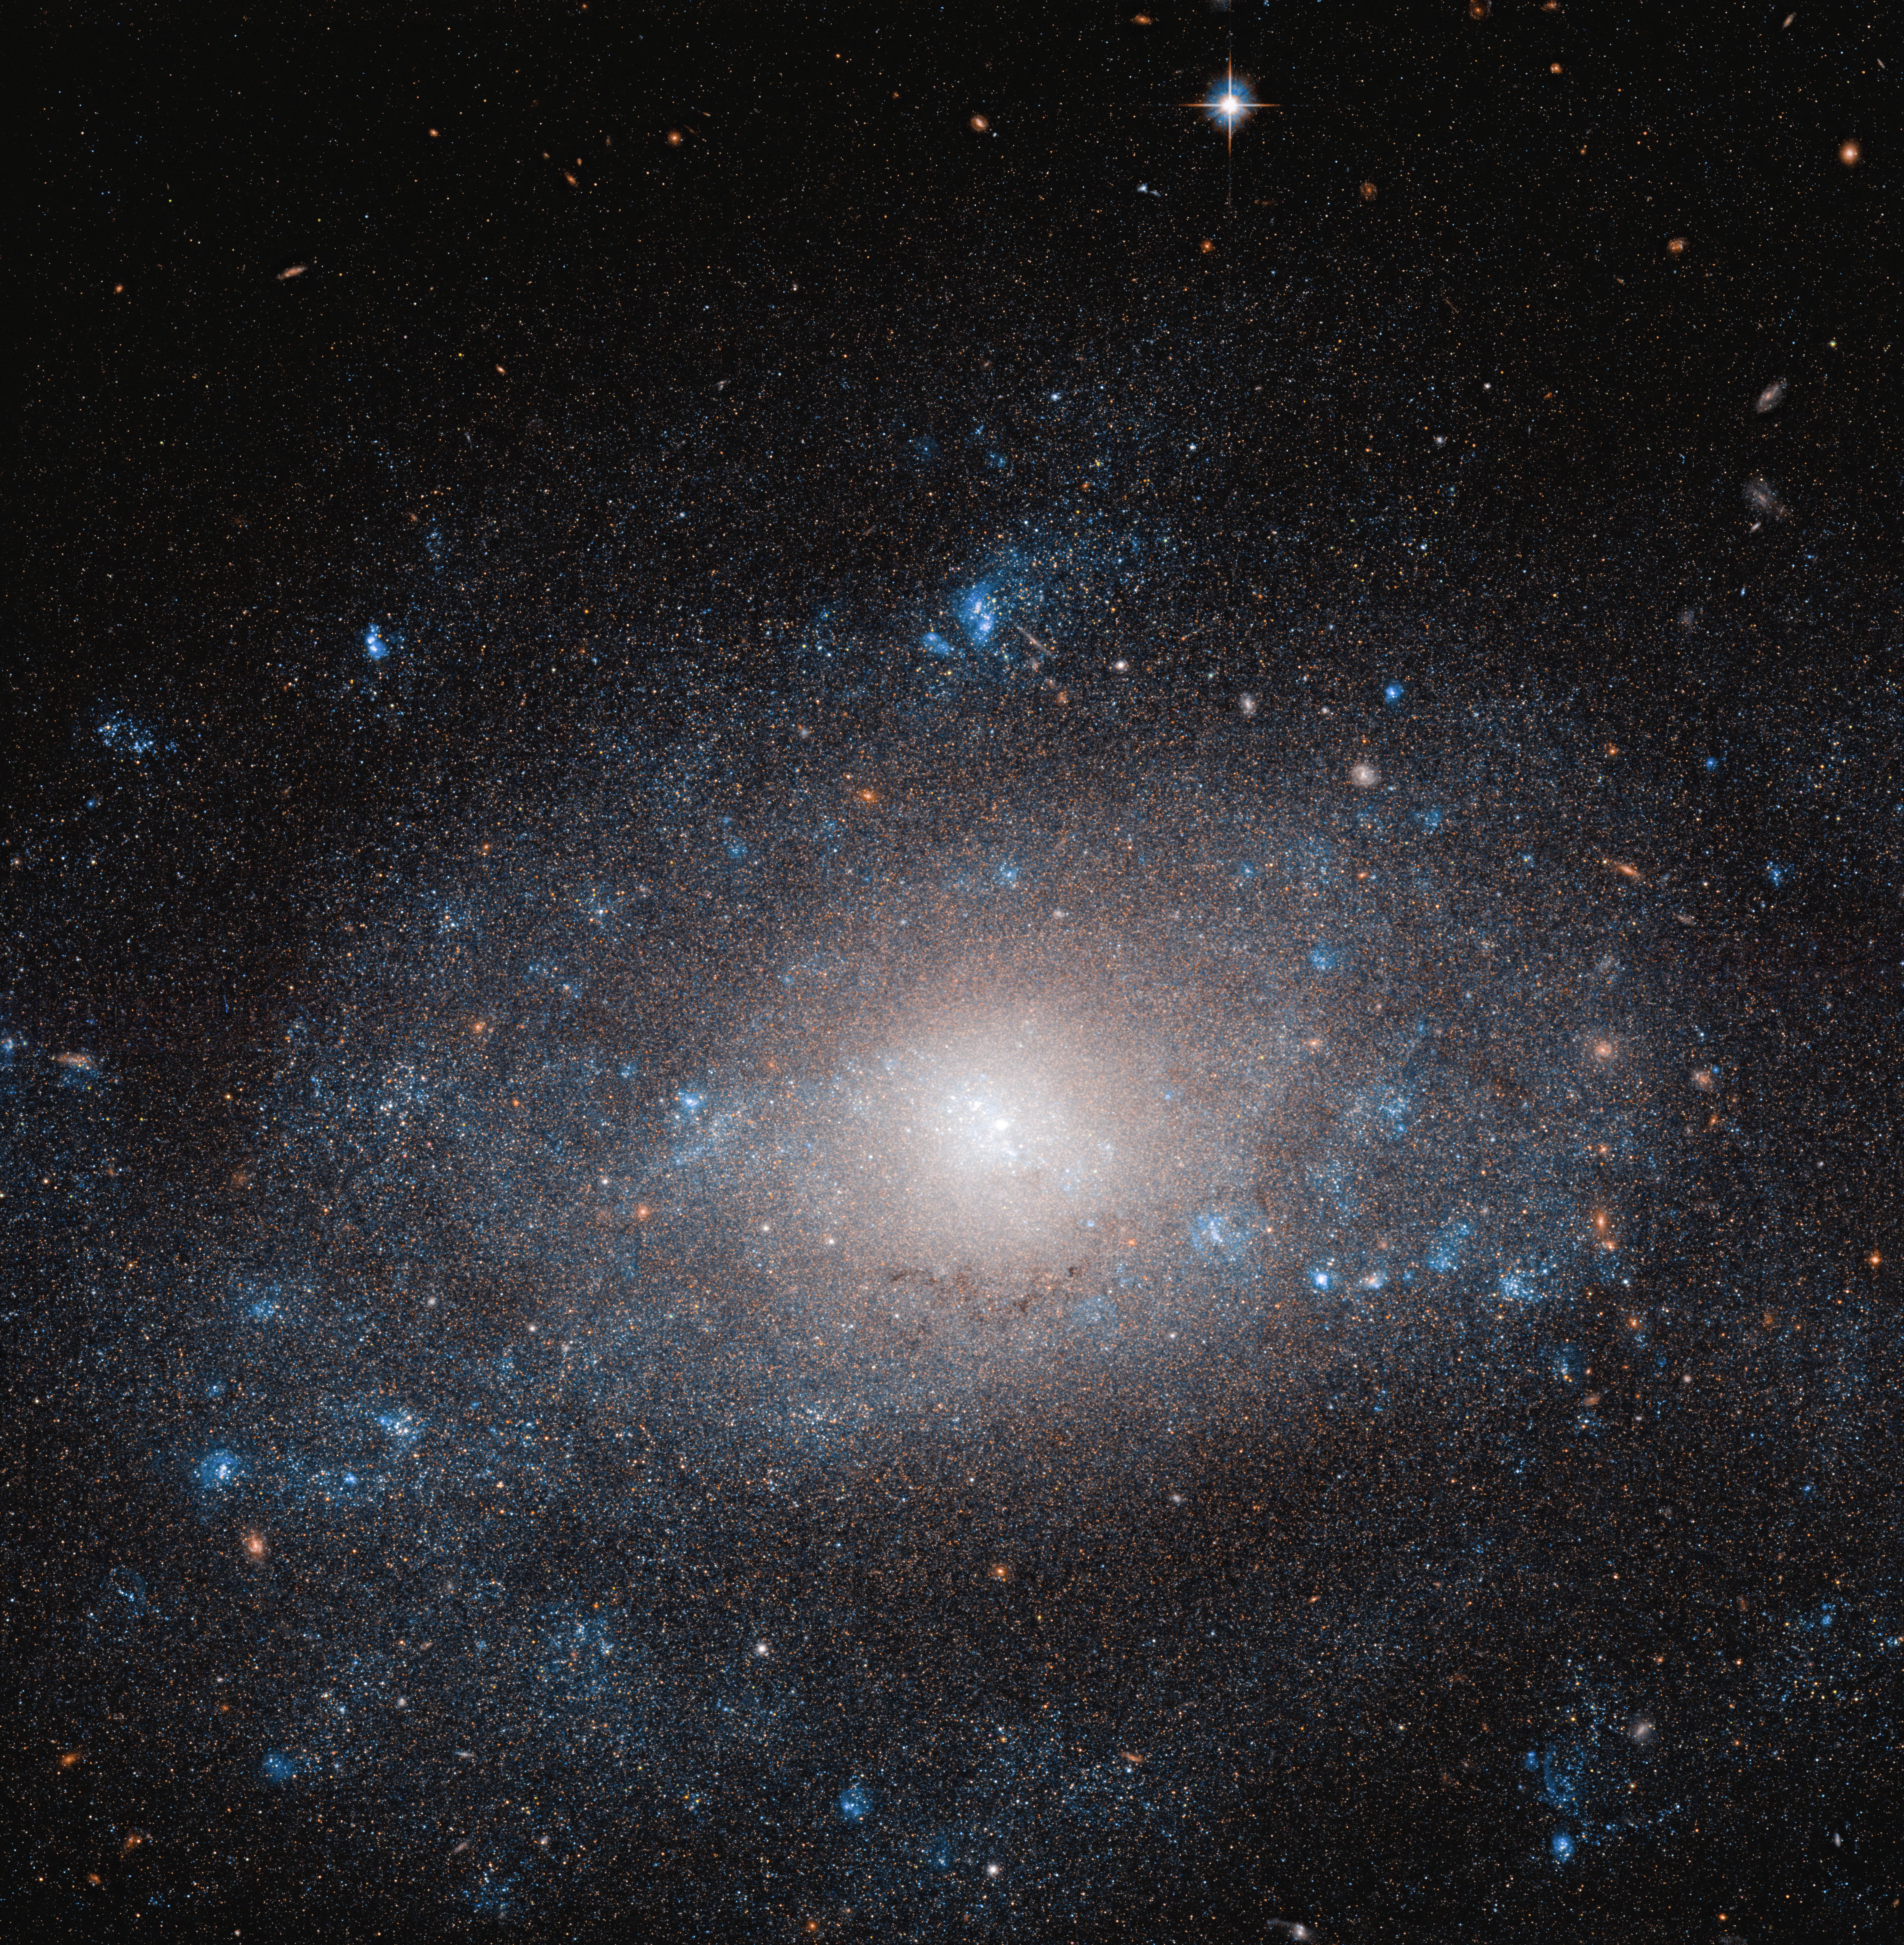

Dark Matter Surplus

Resting on the tail of the Great Bear in the constellation of Ursa Major, lies NGC 5585, a spiral galaxy that is more than it appears.

The many stars, and dust and gas clouds that make up NGC 5585, shown here in this Hubble image, contribute only a small fraction of the total mass of the galaxy. As in many galaxies, this discrepancy can be explained by the abundant yet seemingly invisible presence of dark matter.

The stellar disc of the galaxy extends over 35 000 light-years across. When compared with galaxies of a similar shape and size, NGC 5585 stands out by having a notably different composition: Contributing to the total mass of the galaxy, it contains a far higher proportion of dark matter.

Hotspots of star formation can be seen along the galaxy’s faint spiral arms. These regions shine a brilliant blue, contrasting strikingly against the ever-black background of space.

Credit: ESA/Hubble & NASA, R. Tully Acknowledgement: Gagandeep Anand